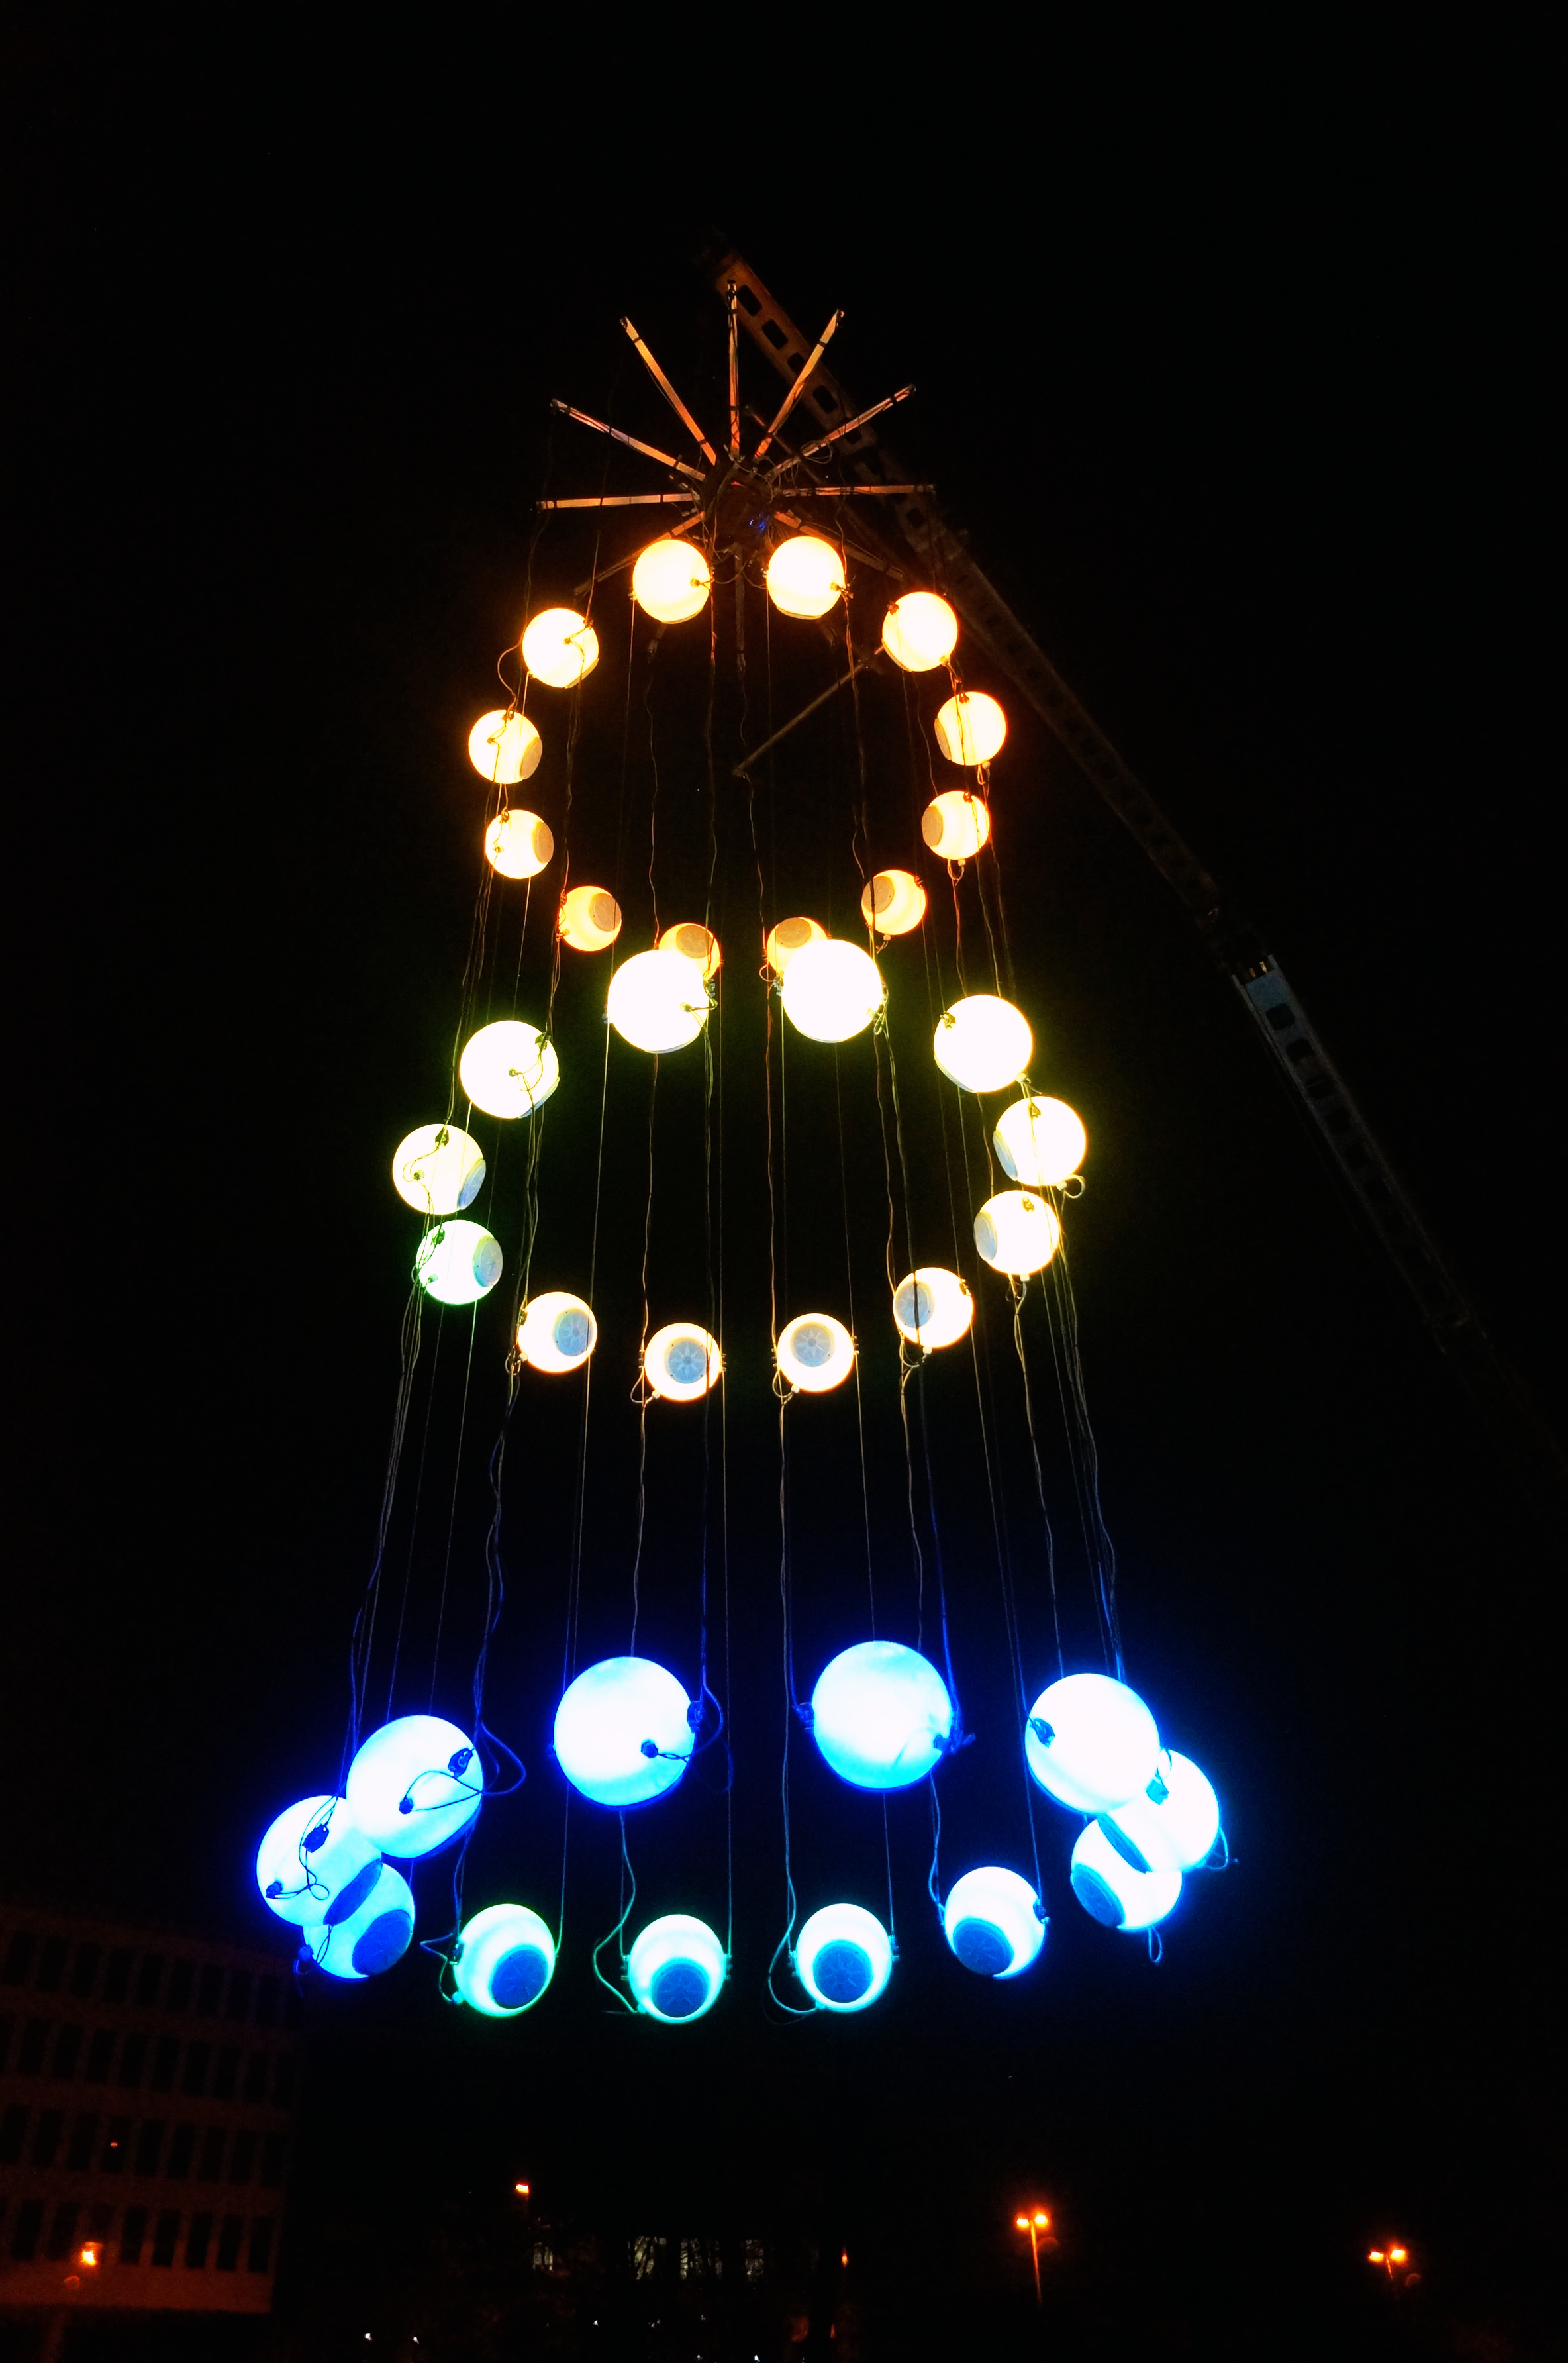

Heaven's carousel

This image shows a new astronomy-inspired art installation that will link together the fields of art, music and astronomy, named Heaven’s Carousel. Conceptualised and designed by German artist and composer Tim Otto Roth, the work is inspired by novel work on the accelerating expansion of the Universe by Nobel laureate Adam Riess (STScl), Greek cosmology and Renaissance astronomers.

Credit: Tim Otto Roth, NASA & ESA